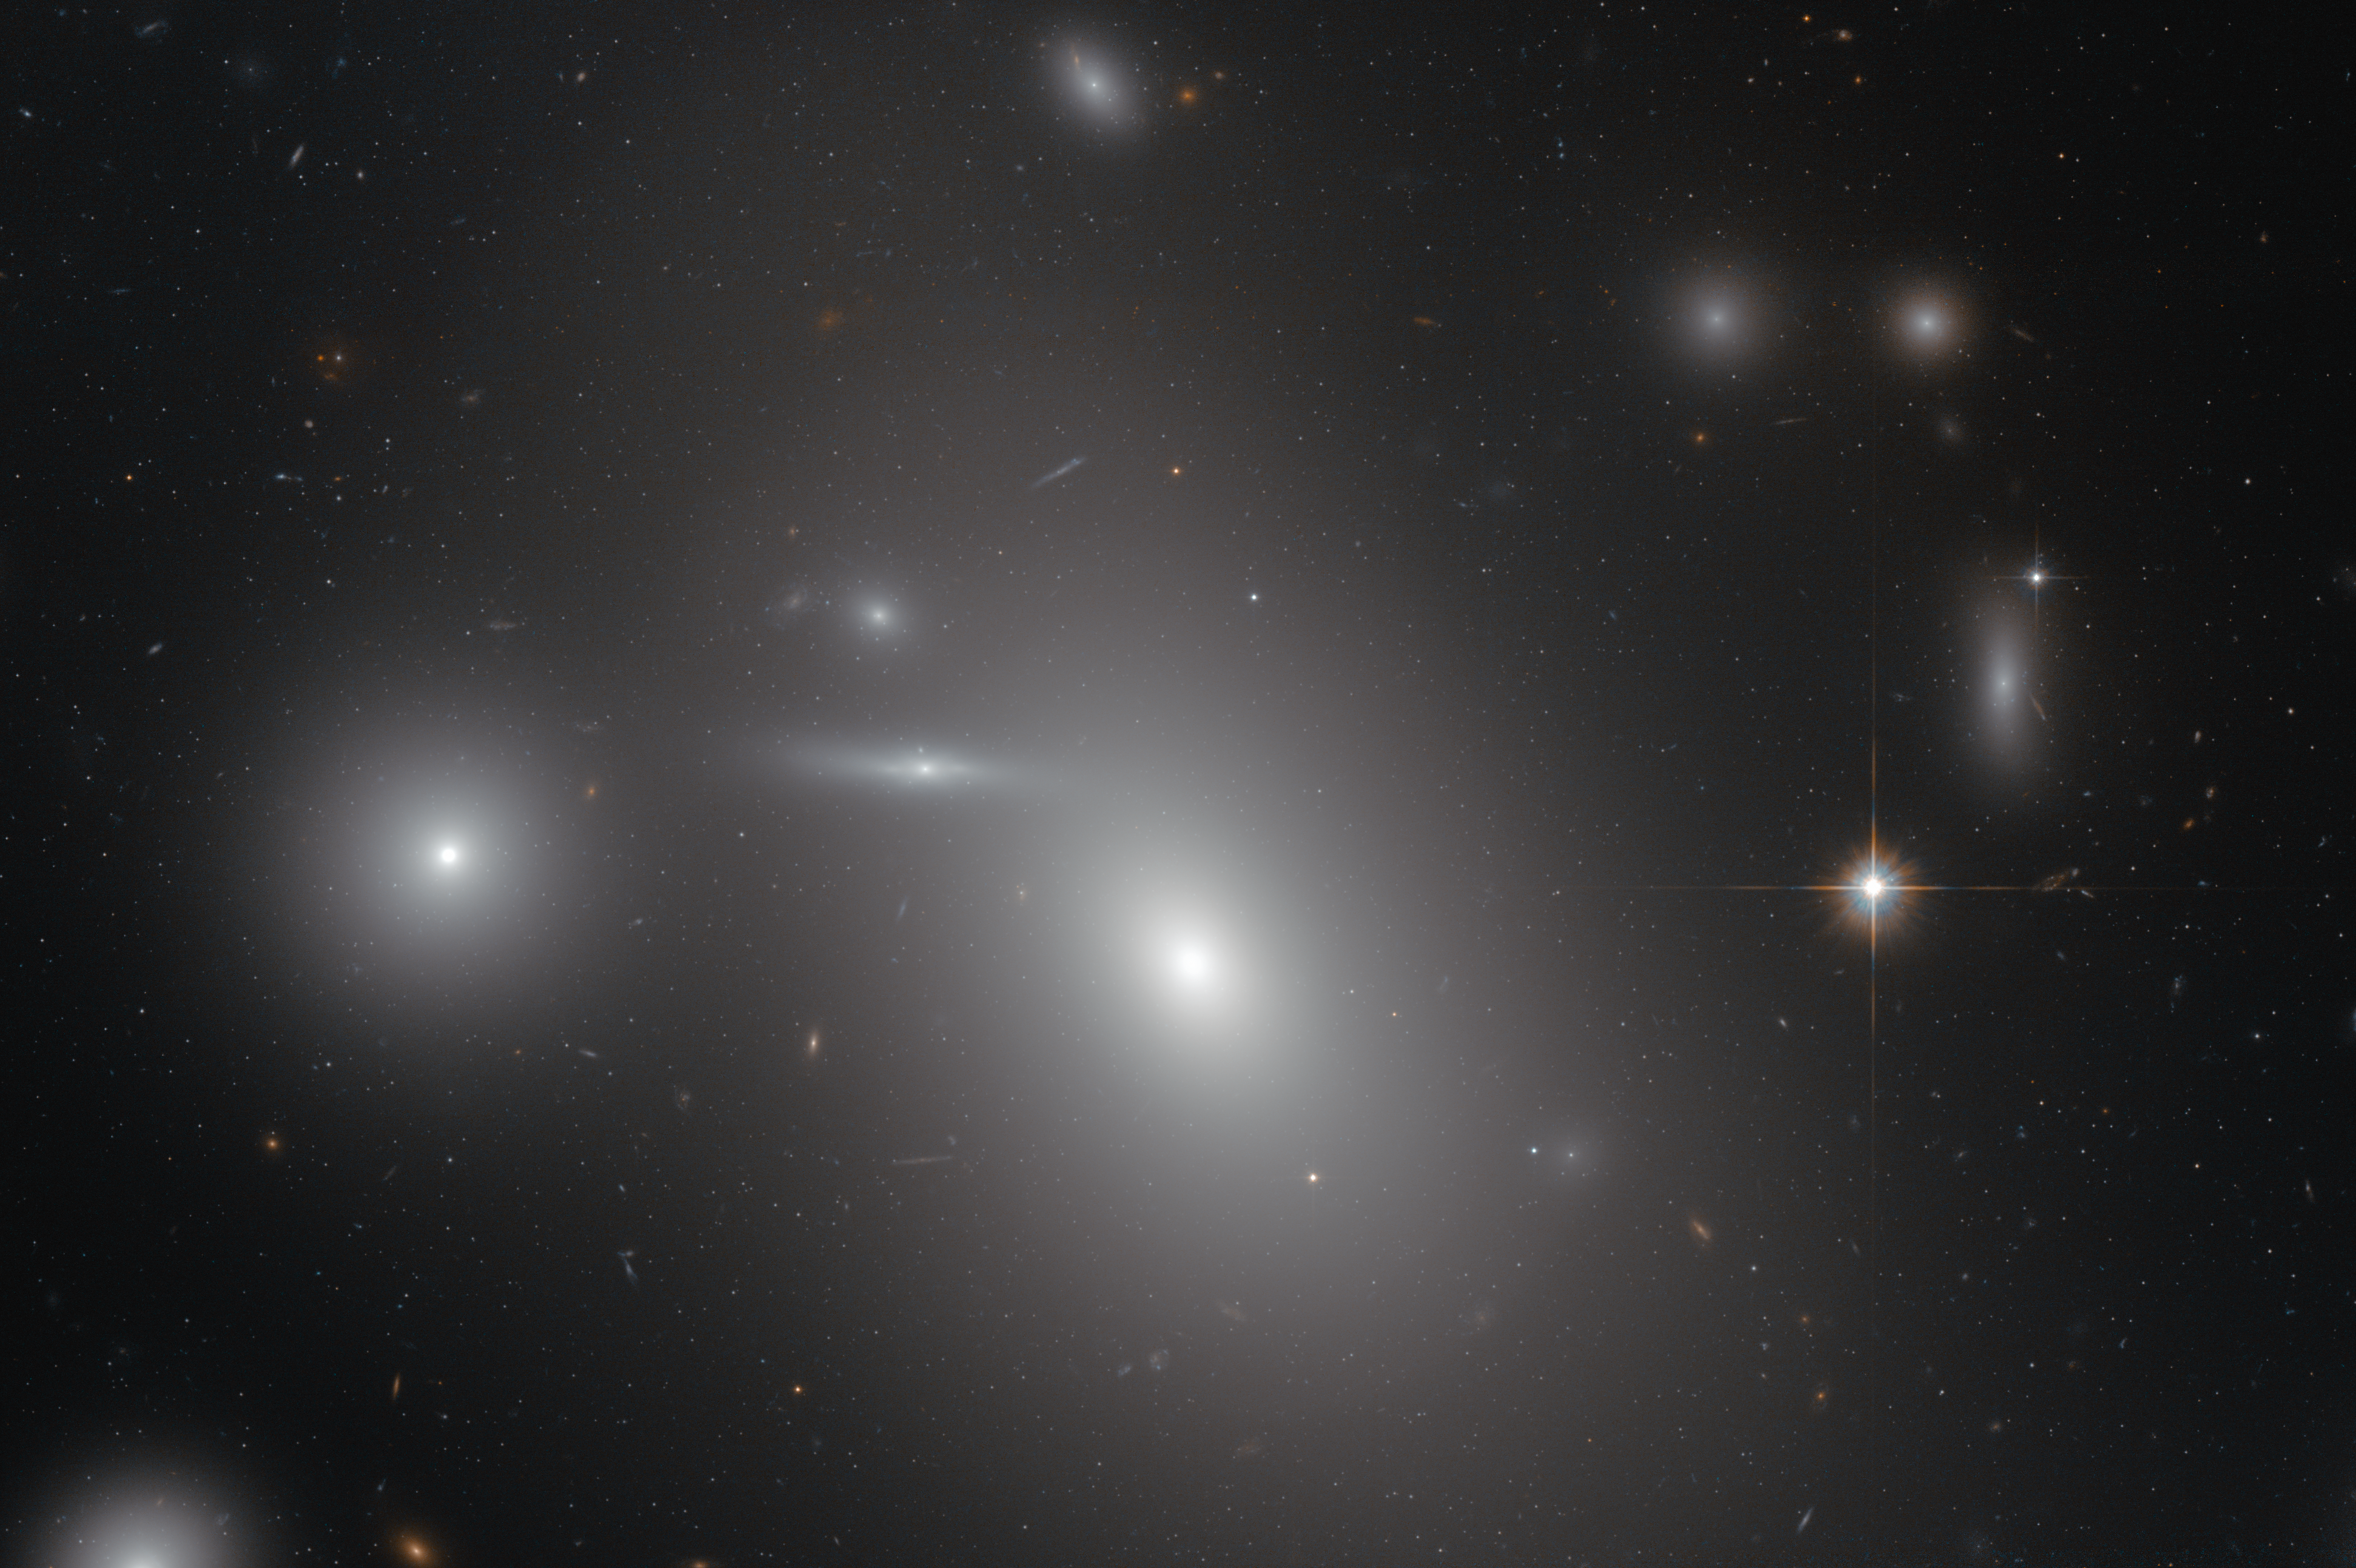

The sleeping giant NGC 4889

This image shows the elliptical galaxy NGC 4889 in front of hundreds of background galaxies, and deeply embedded within the Coma galaxy cluster. Well-hidden from human eyes, there is a gigantic supermassive black hole at the centre of the galaxy.

Credit: NASA & ESA